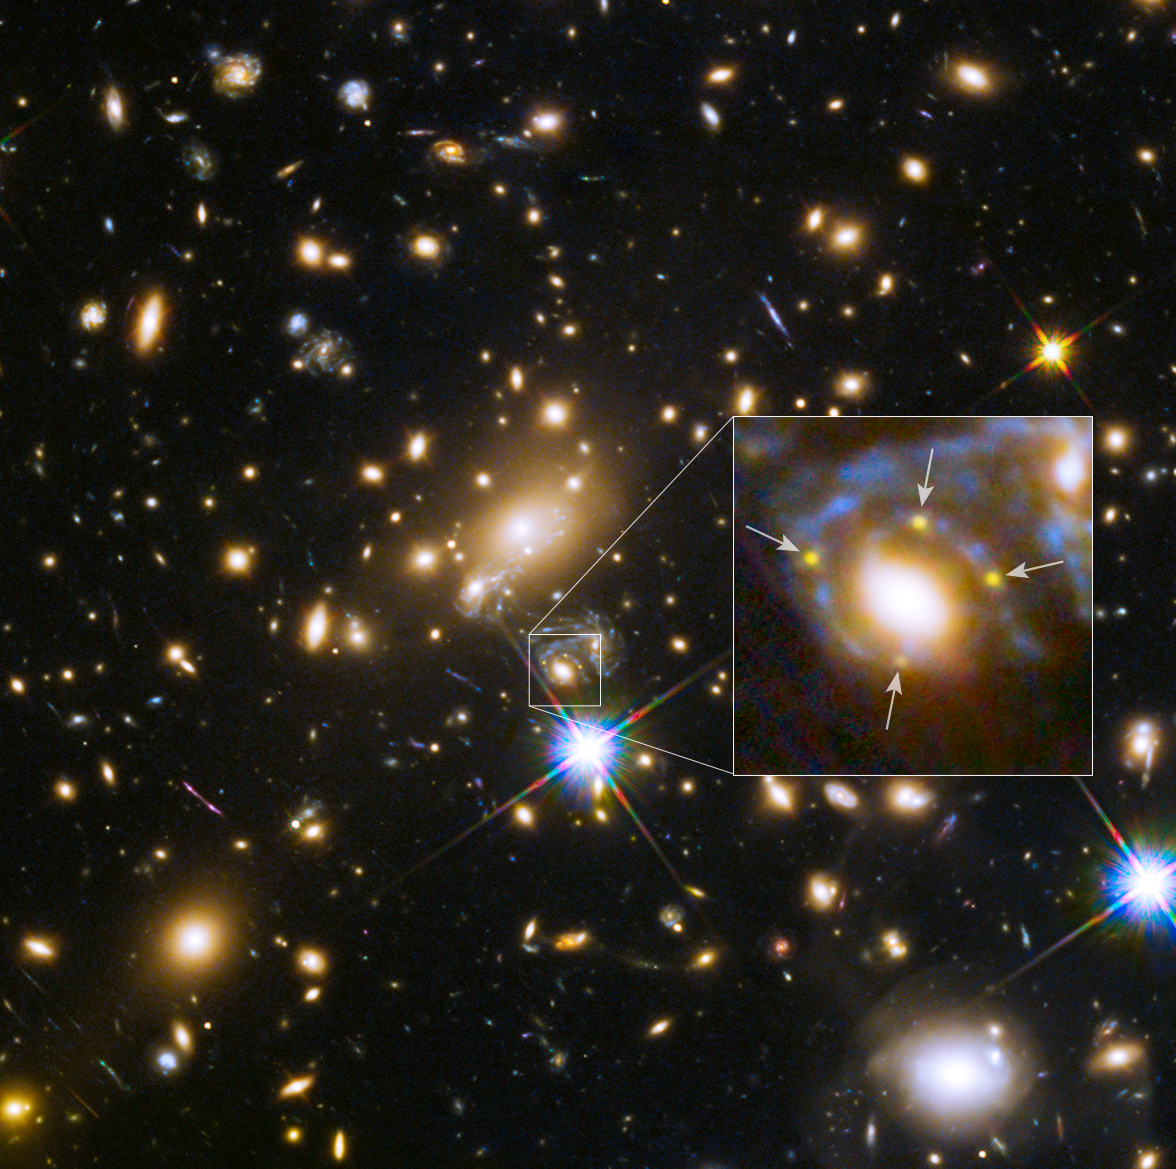

Galaxy cluster MACS j1149.5+223 and a supernova four times over

This image shows the huge galaxy cluster MACS J1149+2223, whose light took over 5 billion years to reach us.

The huge mass of the cluster and one of the galaxies within it is bending the light from a supernova behind them and creating four separate images of it. The light has been magnified and distorted due to gravitational lensing and as a result the images are arranged around the elliptical galaxy in a formation known as an Einstein cross.

A close-up of the Einstein cross is shown in the inset.

Credit: NASA, ESA, S. Rodney (John Hopkins University, USA) and the FrontierSN team; T. Treu (University of California Los Angeles, USA), P. Kelly (University of California Berkeley, USA) and the GLASS team; J. Lotz (STScI) and the Frontier Fields team; M. Postman (STScI) and the CLASH team; and Z. Levay (STScI)